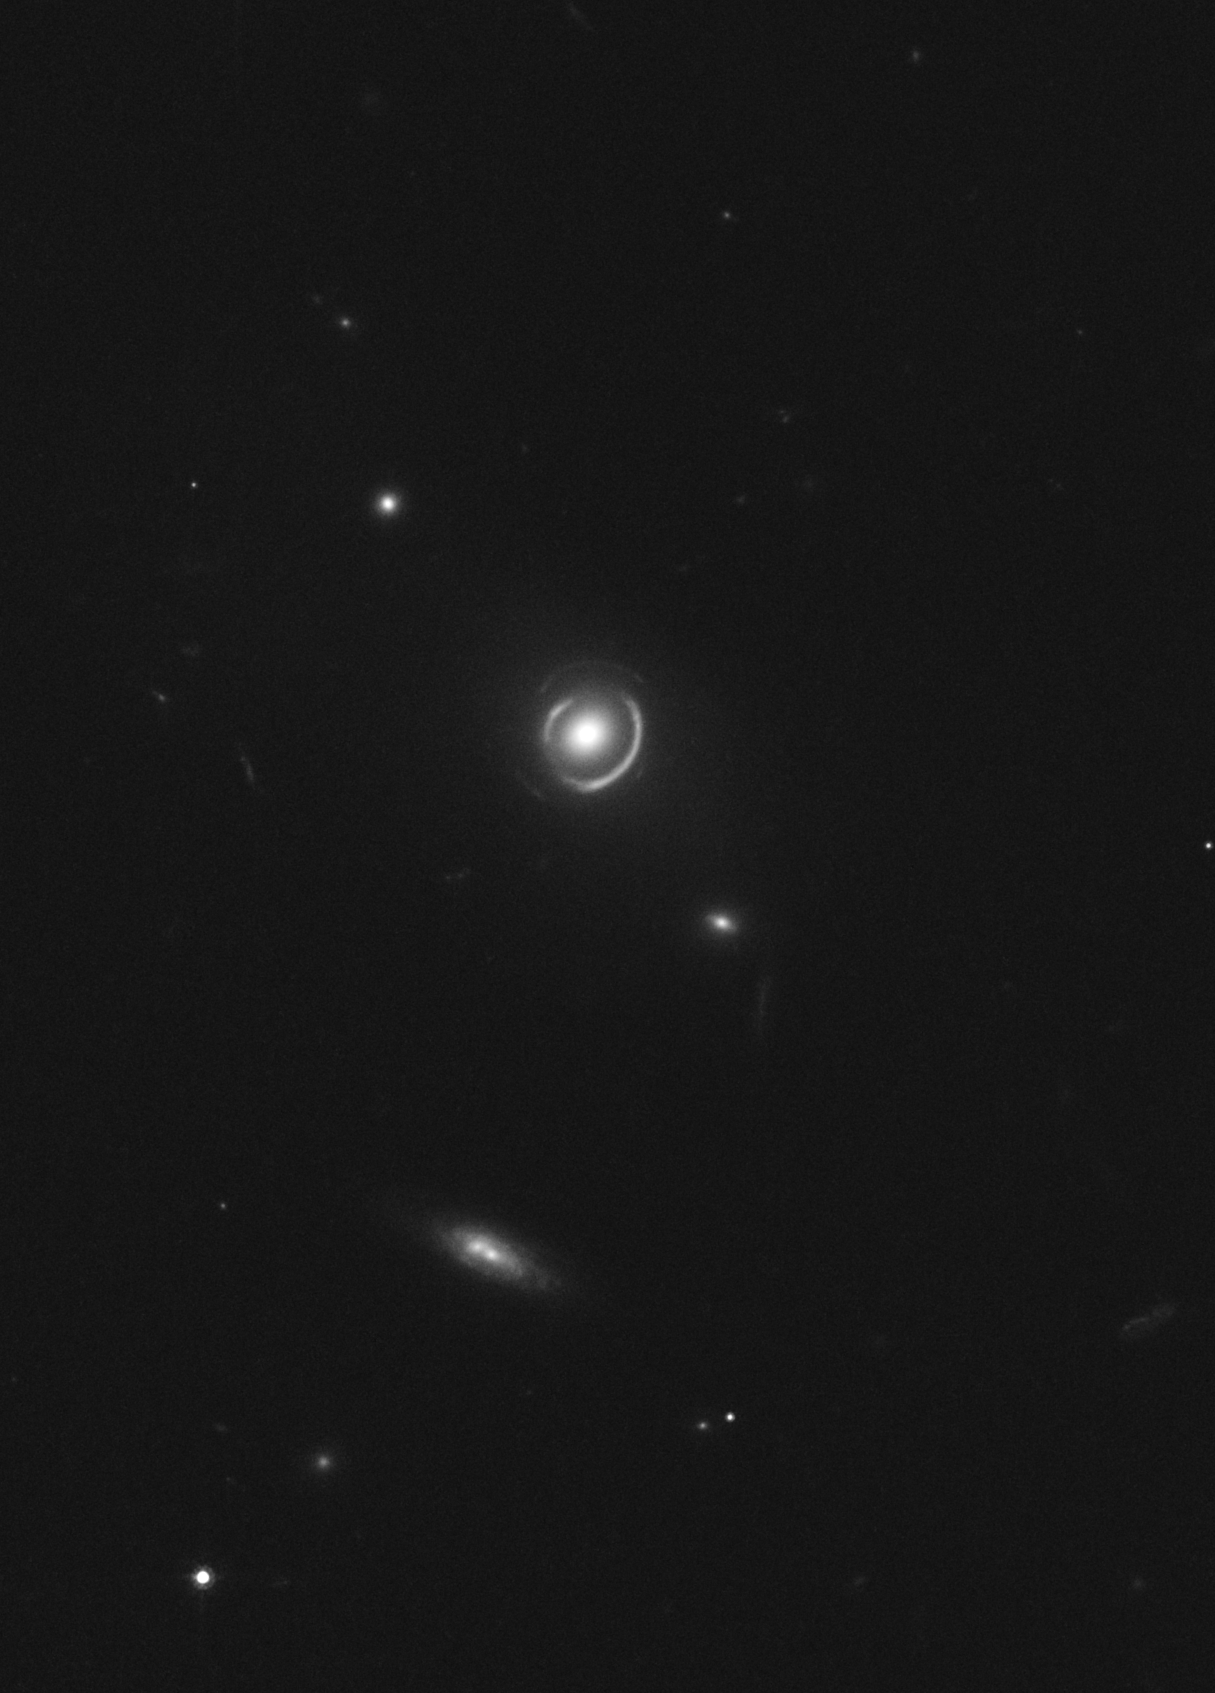

Double Einstein ring

This is an image of gravitational lens system SDSSJ0946+1006 as photographed by Hubble Space Telescope's Advanced Camera for Surveys. The gravitational field of an elliptical galaxy warps the light of two galaxies exactly behind it. The massive foreground galaxy is almost perfectly aligned in the sky with two background galaxies at different distances. The foreground galaxy is 3 billion light-years away, the inner ring and outer ring are comprised of multiple images of two galaxies at a distance of 6 and approximately 11 billion light-years. The odds of seeing such a special alignment are estimated to be 1 in 10,000.

Credit: NASA, ESA, and R. Gavazzi and T. Treu (University of California, Santa Barbara)